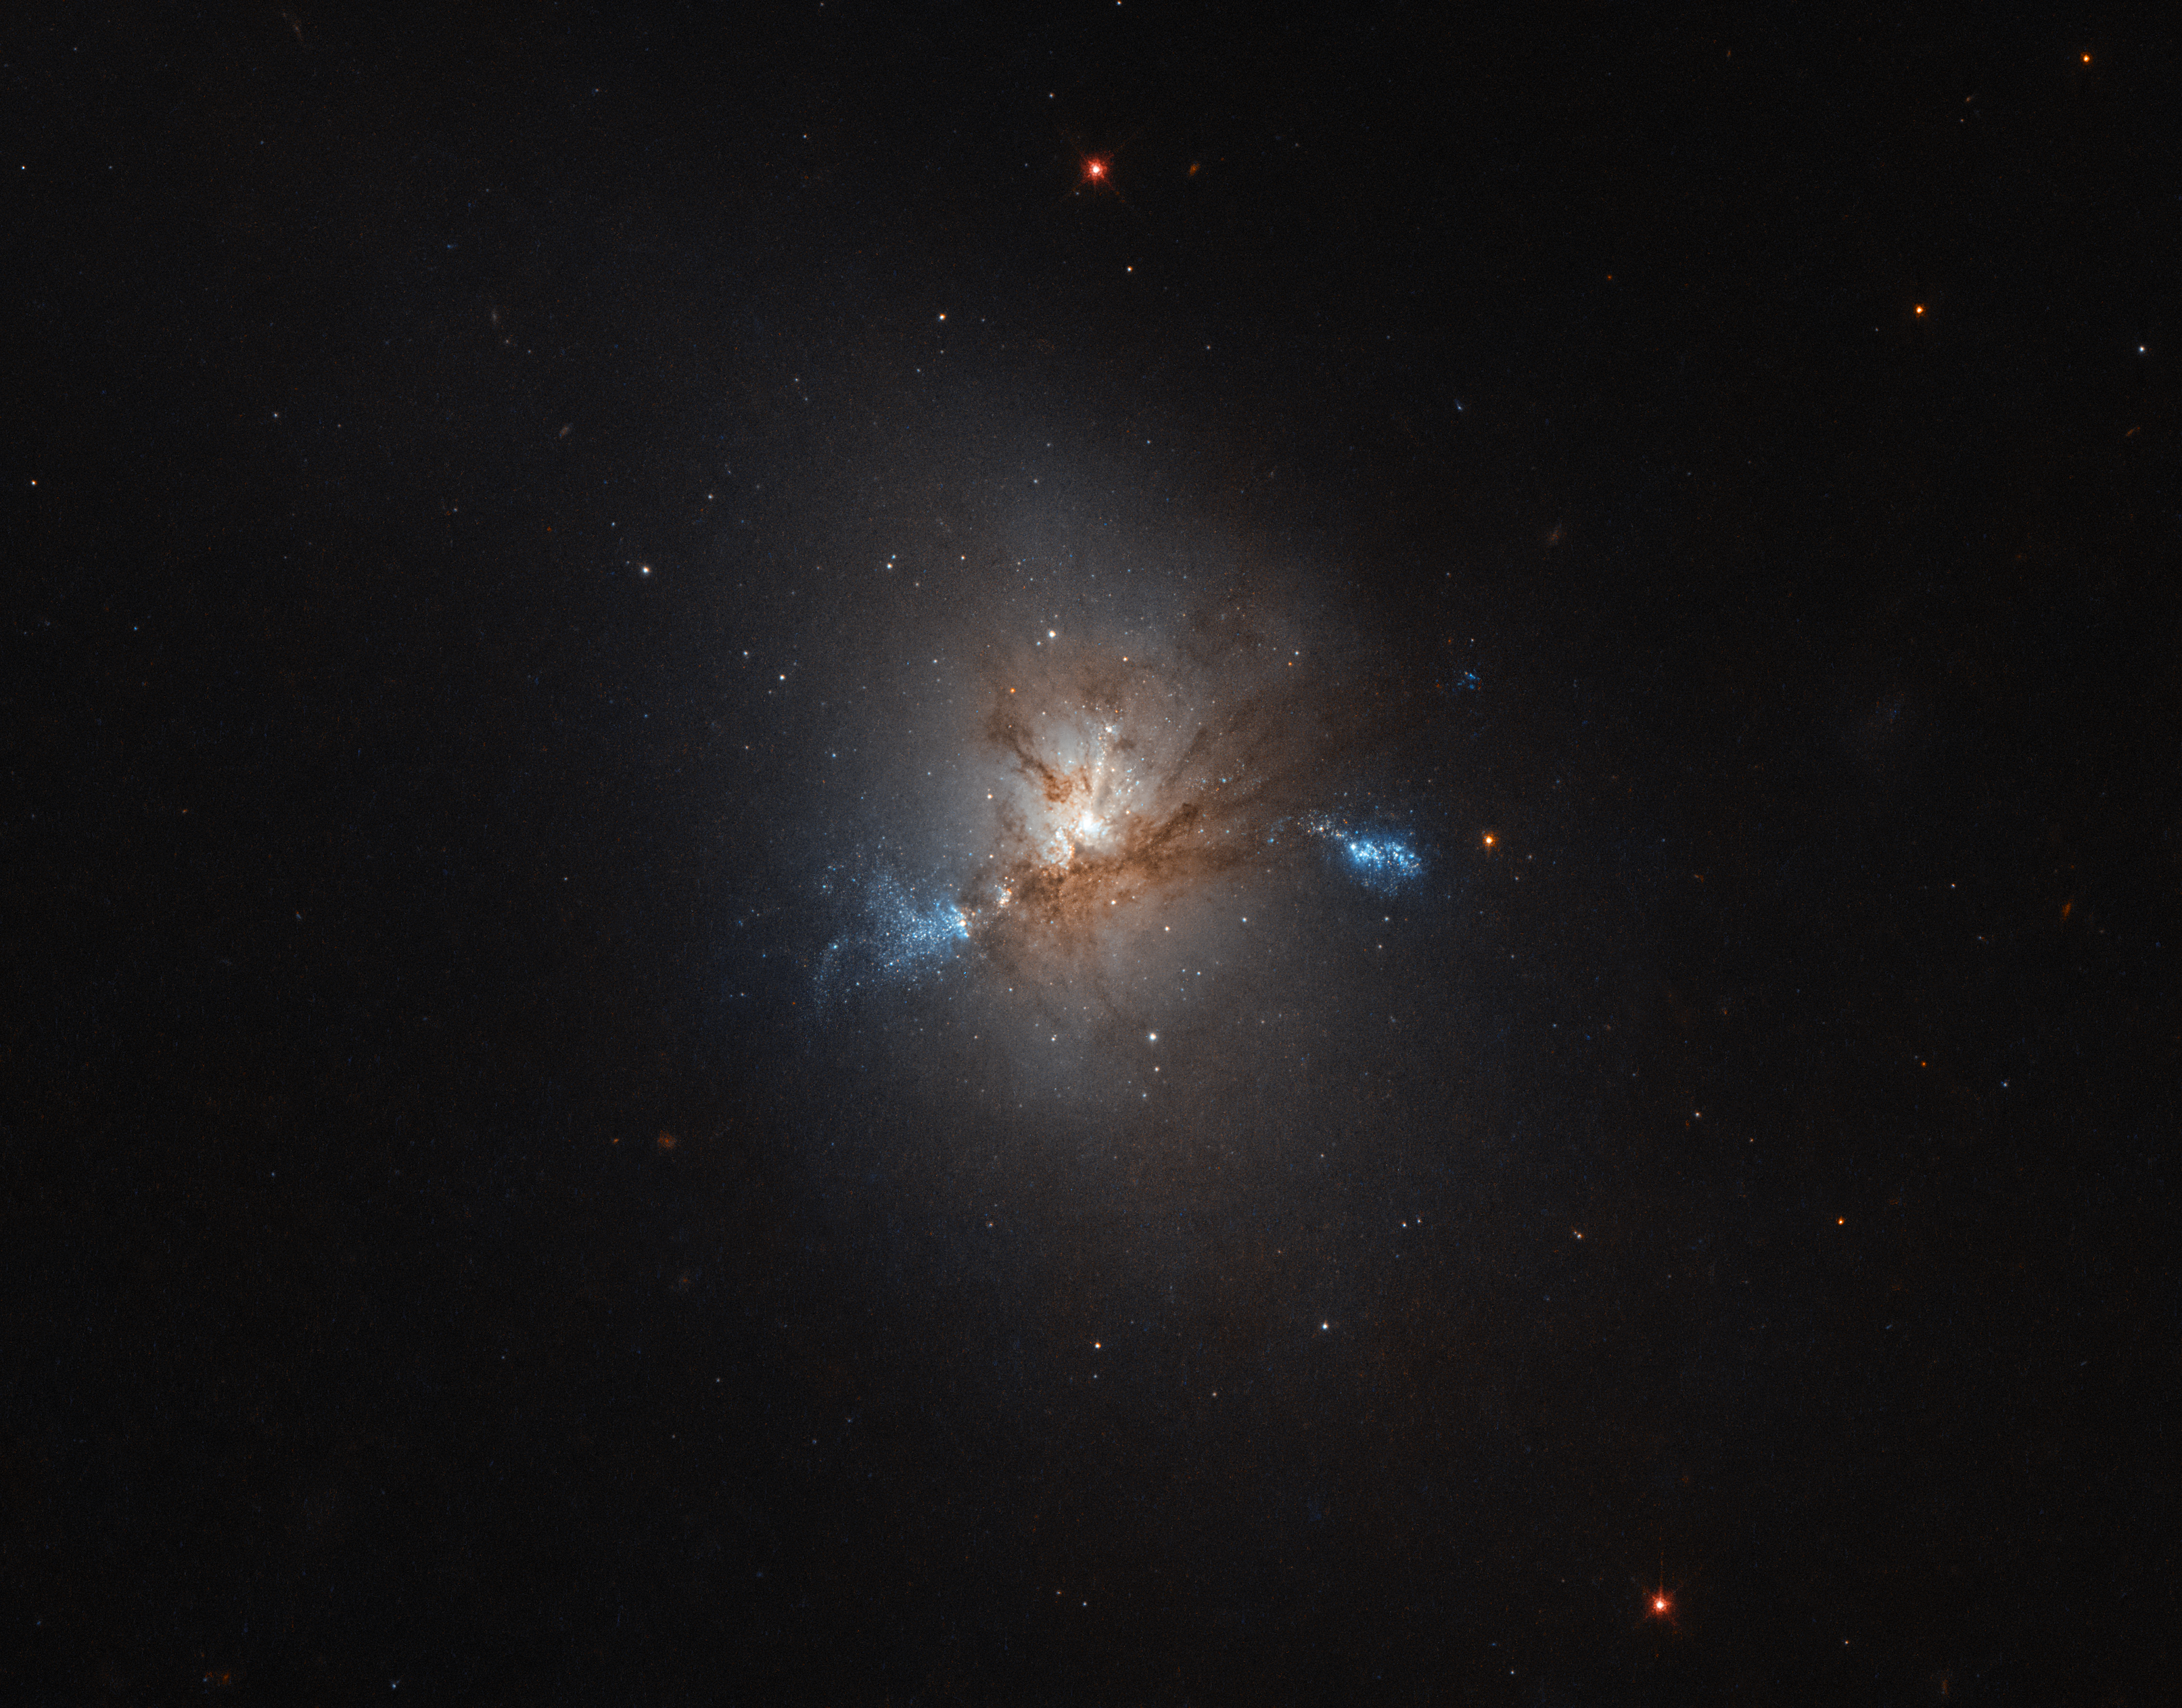

A greedy giant

NGC 1222, seen in this image taken with the Wide Field Camera 3 on board the NASA/ESA Hubble Space Telescope (HST), is a galaxy with a rather eventful story to tell. NGC 1222 has been described as a peculiar example of a type of galaxy known as a lenticular galaxy. Typically, this kind of galaxy would present a rather smooth appearance on the sky and would consist mostly of old, reddish stars. A bit dull, perhaps.

But NGC 1222 is certainly not a typical member of its class — and it’s anything but dull. Observations show the characteristic features of very recent star formation on a huge scale — an event known as a starburst. The reason for all this violent activity is caused by the fact that NGC 1222 is not alone. It actually contains three compact regions, each of which appears to be the central nucleus of a galaxy. Astronomers think that NGC 1222 is in the process of swallowing up two much smaller dwarf galaxies that strayed too close to it. It is likely that the encounter was the trigger for the starburst in NGC 1222, bringing in fresh supplies of gas that are now fuelling the burst of star formation.

Although its peculiarities were first seen in photographic images, these were not able to reveal the level of fine detail that can be recovered by Hubble. The image taken by Hubble allows us to see an astonishing amount of structure in this galaxy, emphasising its colourful history. Against the smooth background of old stars that was the original lenticular galaxy, we can clearly see dark filaments of dust and bright filaments of gas, both associated with the powerful star formation process.

Credit: ESA/Hubble & NASA